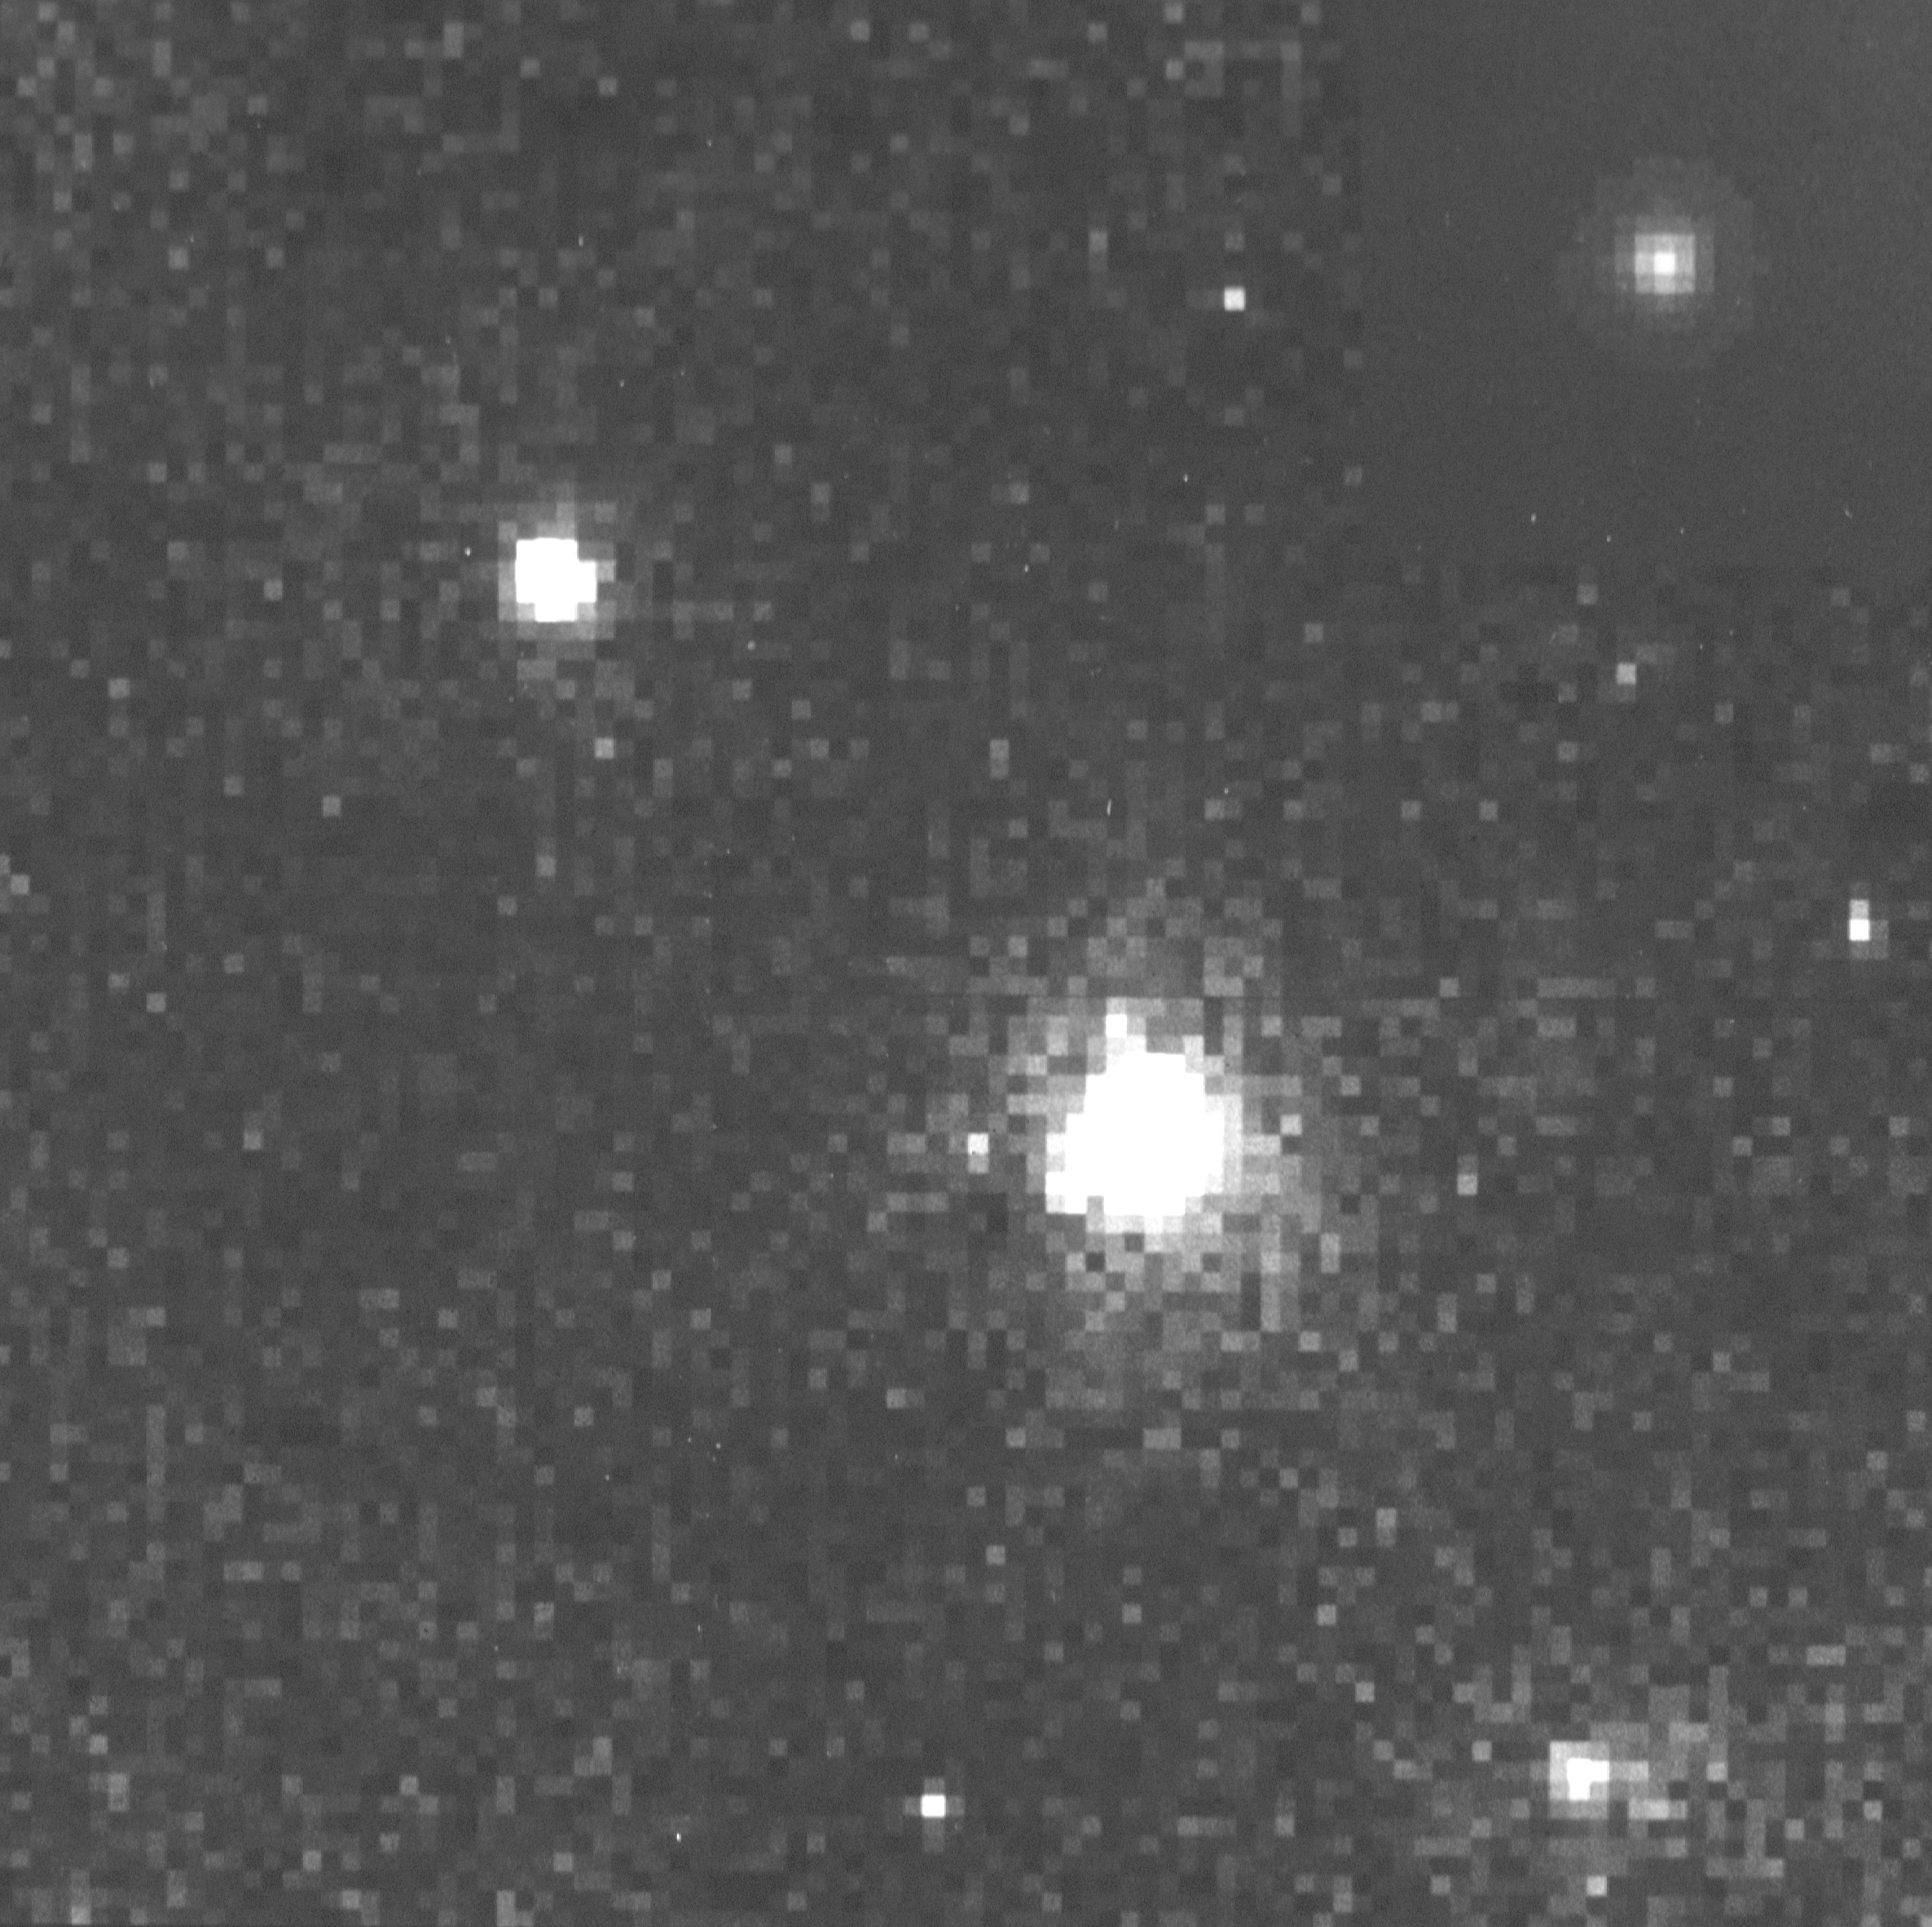

Radio galaxy 53W002

This is a small portion of an image taken with NASAESA Hubble Space Telescope href="http://www.spacetelescope.org/about/index.html">HST) Wide Field Planetary camera (WFPC) in WF mode a near-infrared (F785LP) filter, showing the distant radio galaxy 53W002 at lower left. The region shown is a subimage 100 WFC pixels (10.16 arcseconds) on a side. The bright object is a foreground galaxy approximately four times closer. The inset the at upper left shows how a nearby galaxy (M87) believed to be similar to 53W002 would appear at the same distance. The distant galaxy is much brighter, showing the time evolution of the stellar population in these galaxies. It is also almost as compact as M87, suggesting that it has nearly completed its collapse under self-gravity while forming stars. The outer regions of 53W002, faintly visible in this reproduction, have a structure remarkably similar to that of nearby, more dynamically resolved galaxies as well. Together with ground-based spectra and theoretical models, this image suggests that we are seeing a galaxy near the end of its formation phase, and that the galaxies initial collapse coincided with its initial round of star formation. This has long been expected theoretically but has been difficult to show. Less expected is timing; 53W002 started the process much later than many galaxies seen at higher redshift, so that the period of galaxy formation must have been drawn out over several billion years.

Credit: Rogier Windorst (Arizona State University) William Keel (University of Alabama) and NASA/ESA